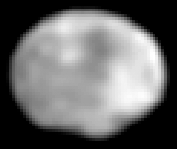

Crater on Asteroid Vesta

A NASA/ESA Hubble Space Telescope image of the asteroid Vesta, taken in May 1996 when the asteroid was 110 million miles (about 177 million kilometres) from Earth.

The asymmetry of the asteroid and 'nub' and the south pole is suggestive that it suffered a large impact event. The image was digitally restored to yield an effective scale of six miles per pixel (picture element.

Credit: Ben Zellner (Georgia Southern University), Peter Thomas (Cornell University), NASA/ESA